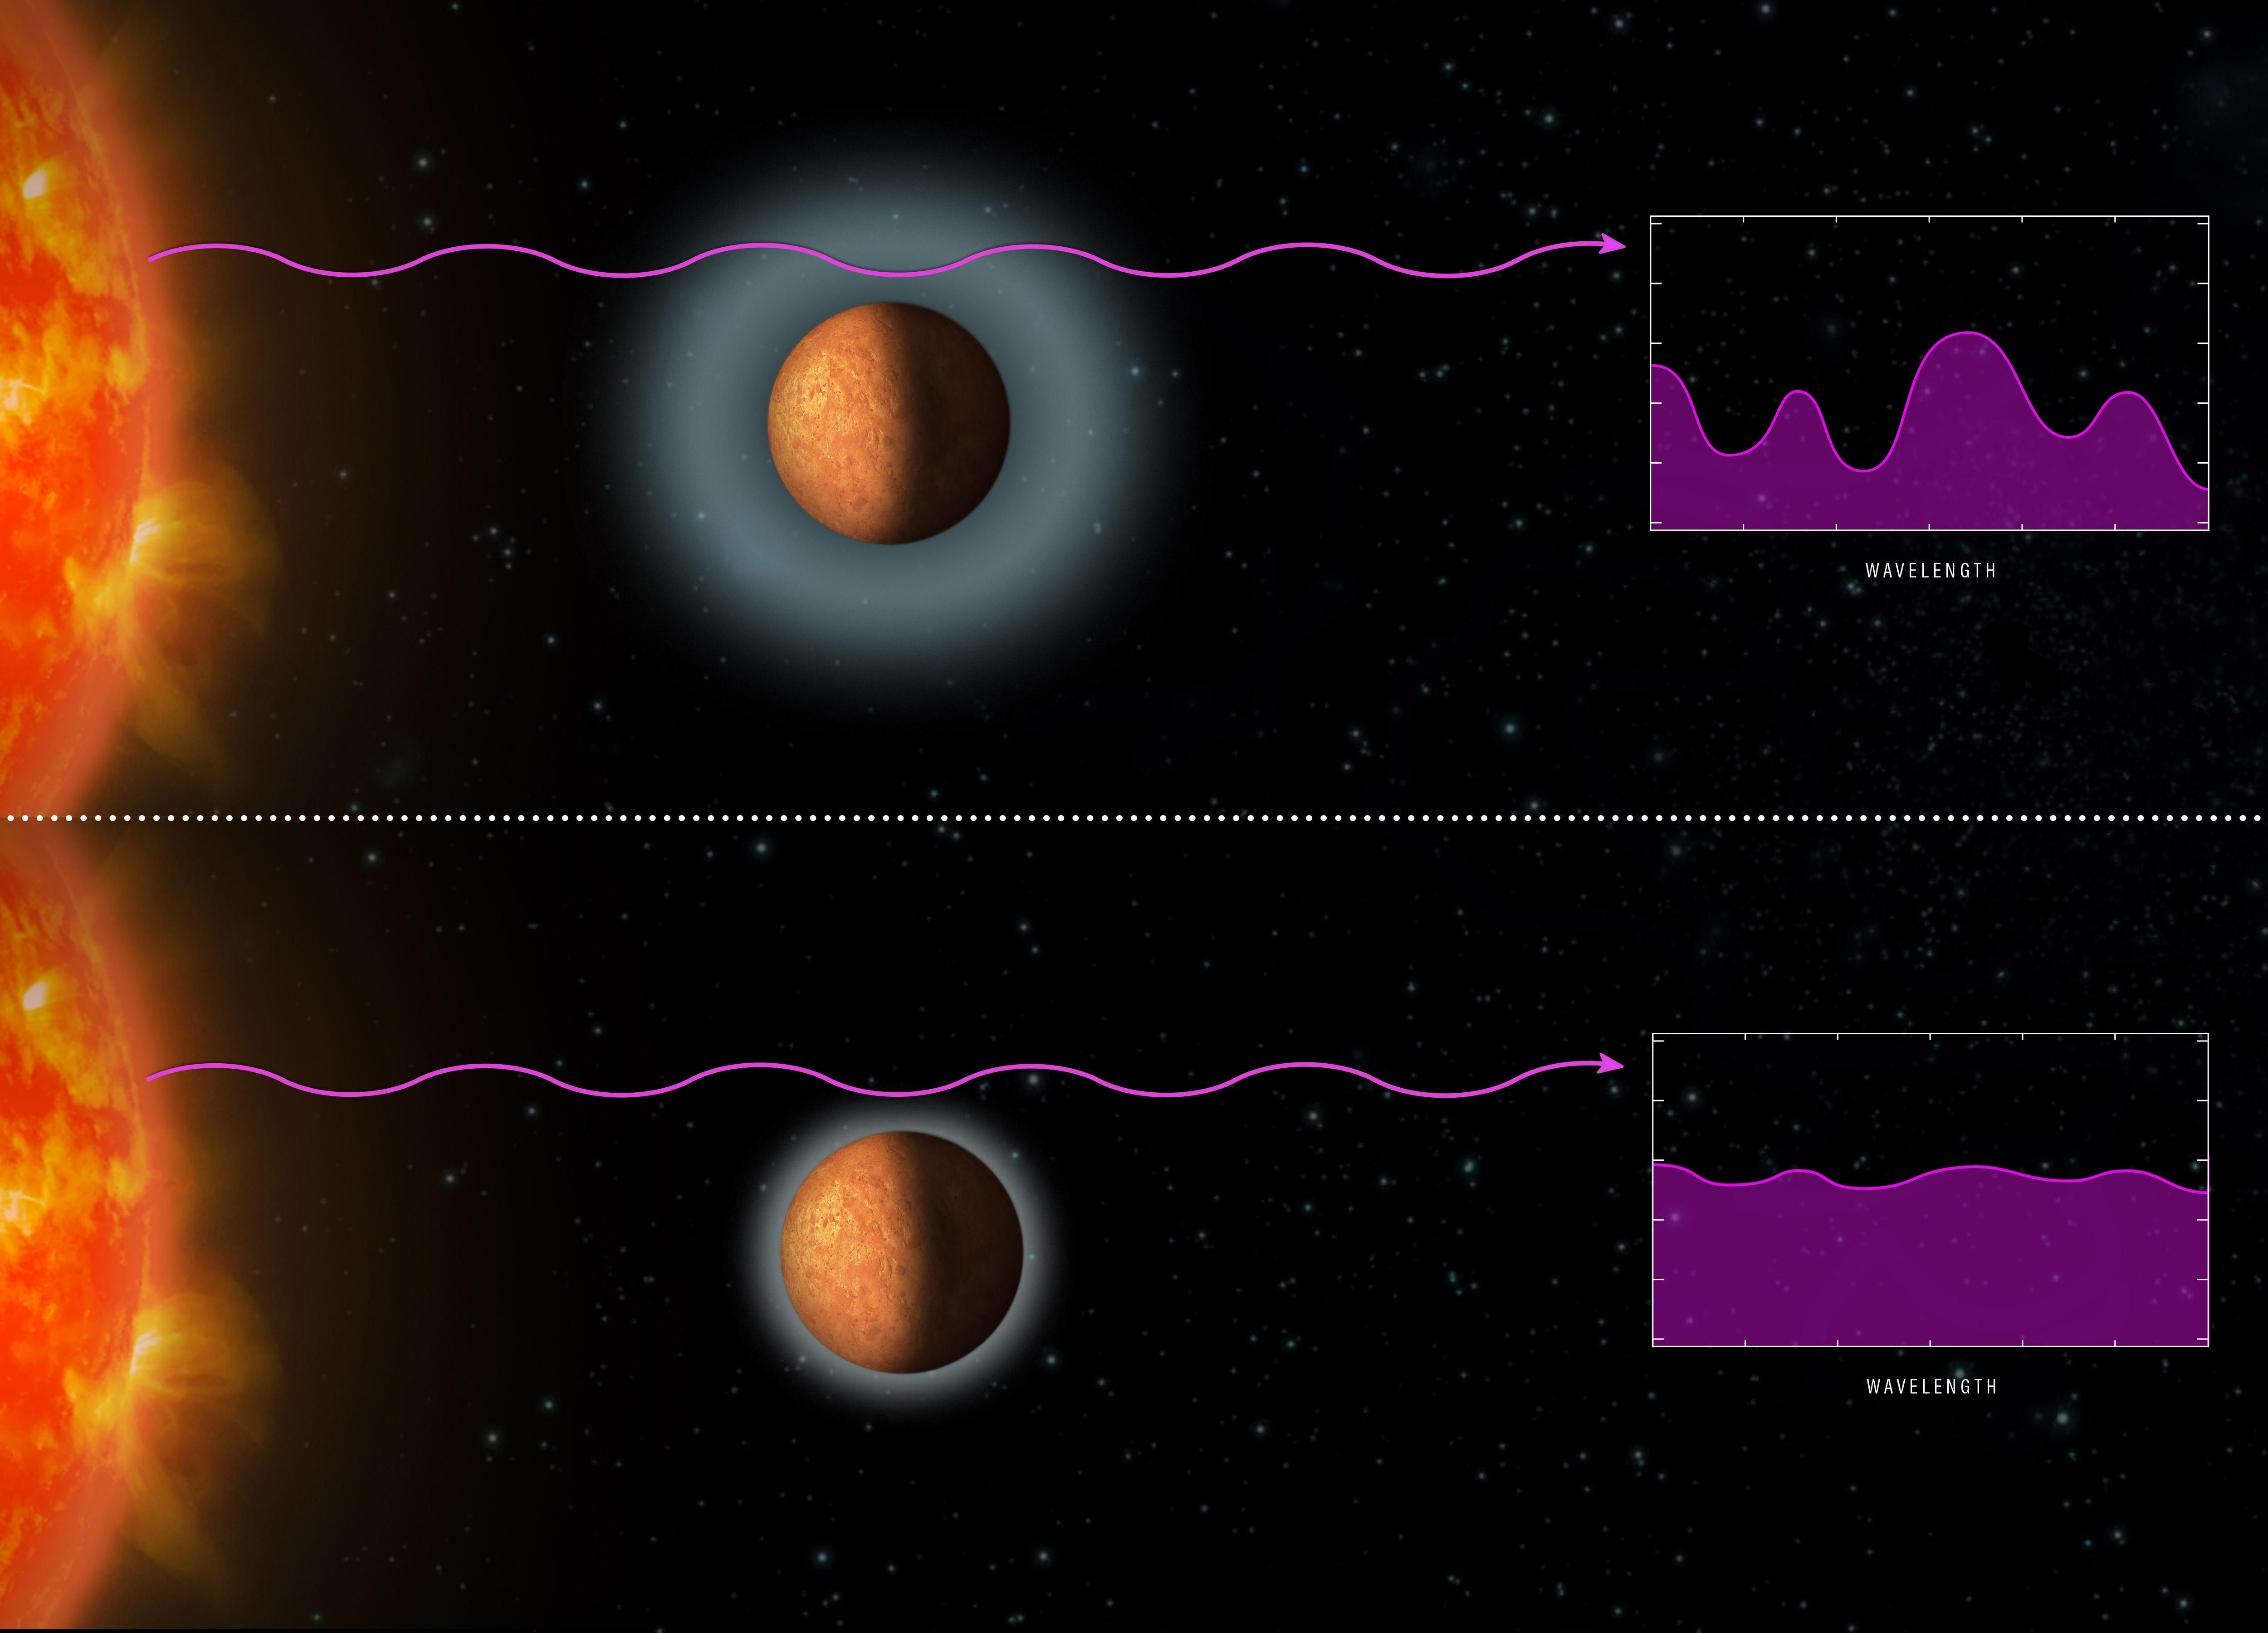

Starlight yields clues to exoplanets’ atmospheres

Astronomers used the NASA/ESA Hubble Space Telescope to analyse light from the nearby star TRAPPIST-1 as it passed through the atmospheres of four Earth-sized planets in the star’s habitable zone — the region at a distance from the star where liquid water, the key to life as we know it, could exist on their surfaces. The astronomers were looking for the signatures of certain gases, including hydrogen, in the atmospheres that were imprinted on the starlight.

The graphic at the top shows a model spectrum containing the signatures of gases that the astronomers would expect to see if the exoplanets’ atmospheres were puffy and dominated by primordial hydrogen from the distant worlds’ formation.

The Hubble observations, however, revealed that the planets do not have hydrogen-dominated atmospheres. The flatter spectrum shown in the lower illustration indicates that Hubble did not spot any traces of water or methane, which are abundant in hydrogen-rich atmospheres. The researchers concluded that the atmospheres are composed of heavier elements residing at much lower altitudes than could be measured by the Hubble observations.

Credit: NASA, ESA and Z. Levy (STScI)